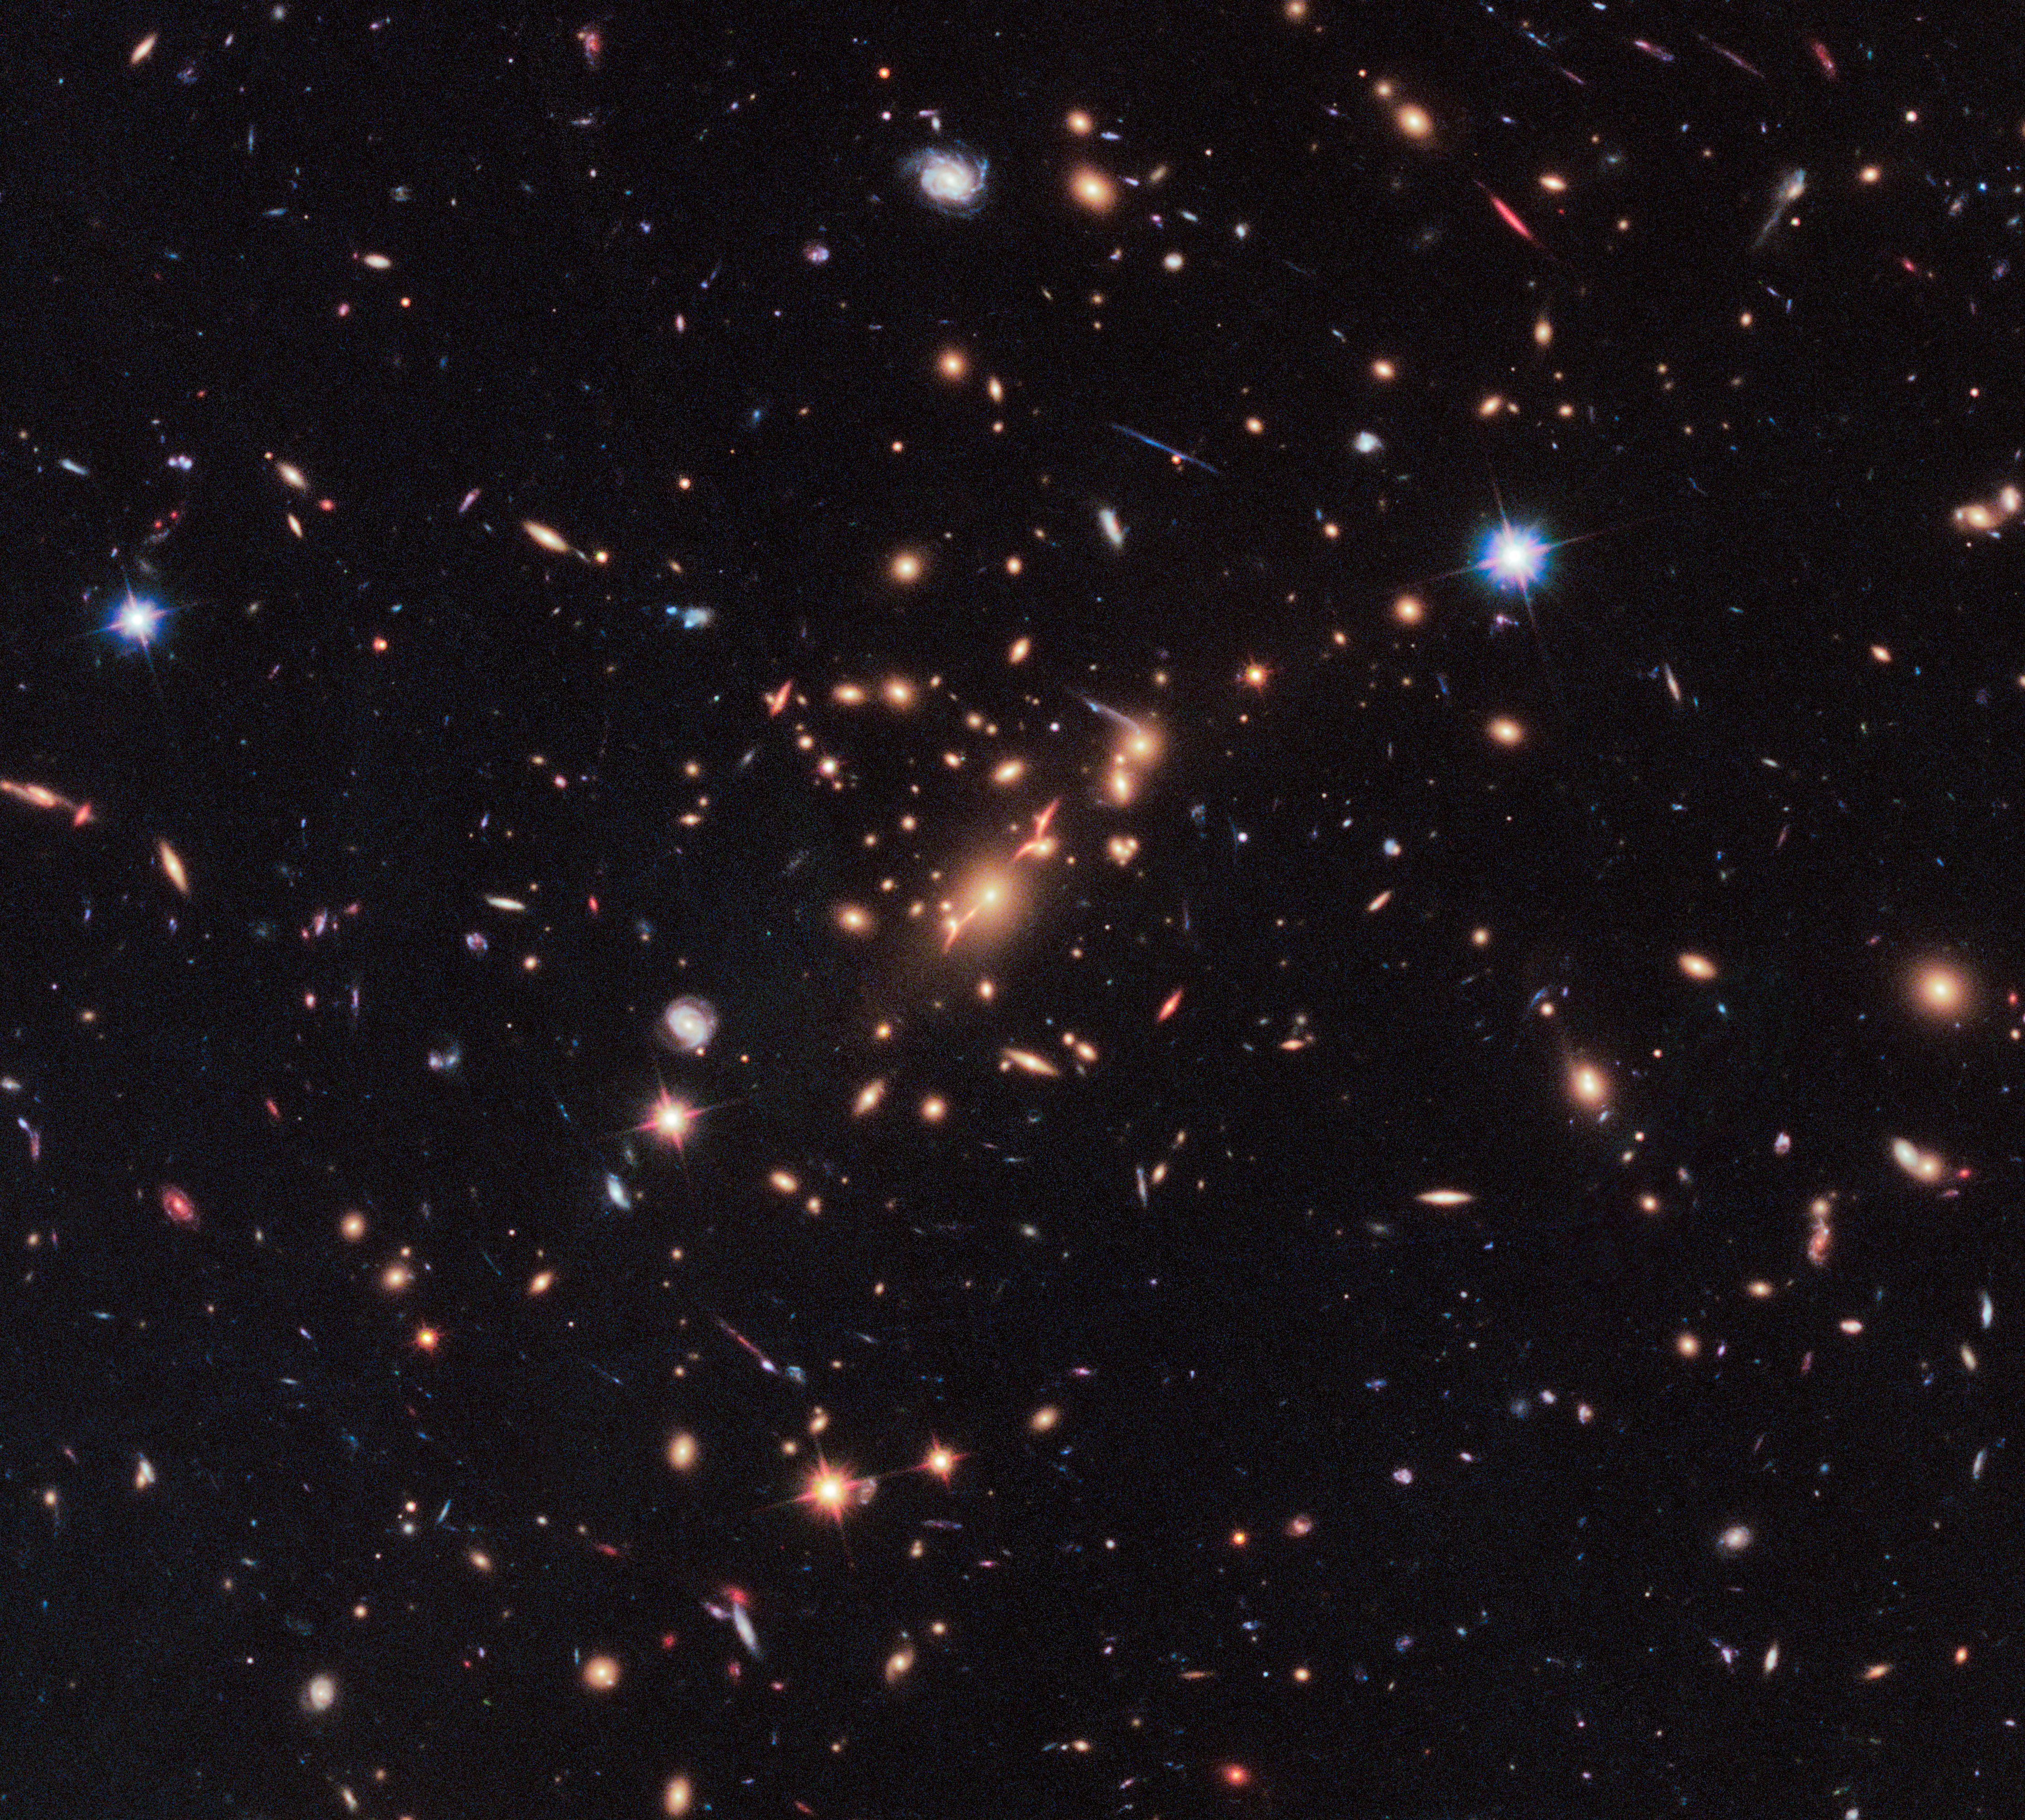

Galaxy cluster MACS J2129-0741

This image is a wide-field view of the galaxy cluster MACS J2129-0741, located in the constellation Aquarius (the Water-Bearer). The massive galaxy cluster magnifies, brightens, and distorts the images of remote background galaxies, including the far-distant, dead disc galaxy MACS2129-1.

Credit: NASA, ESA, Marc Postman (STScI), and the CLASH team.